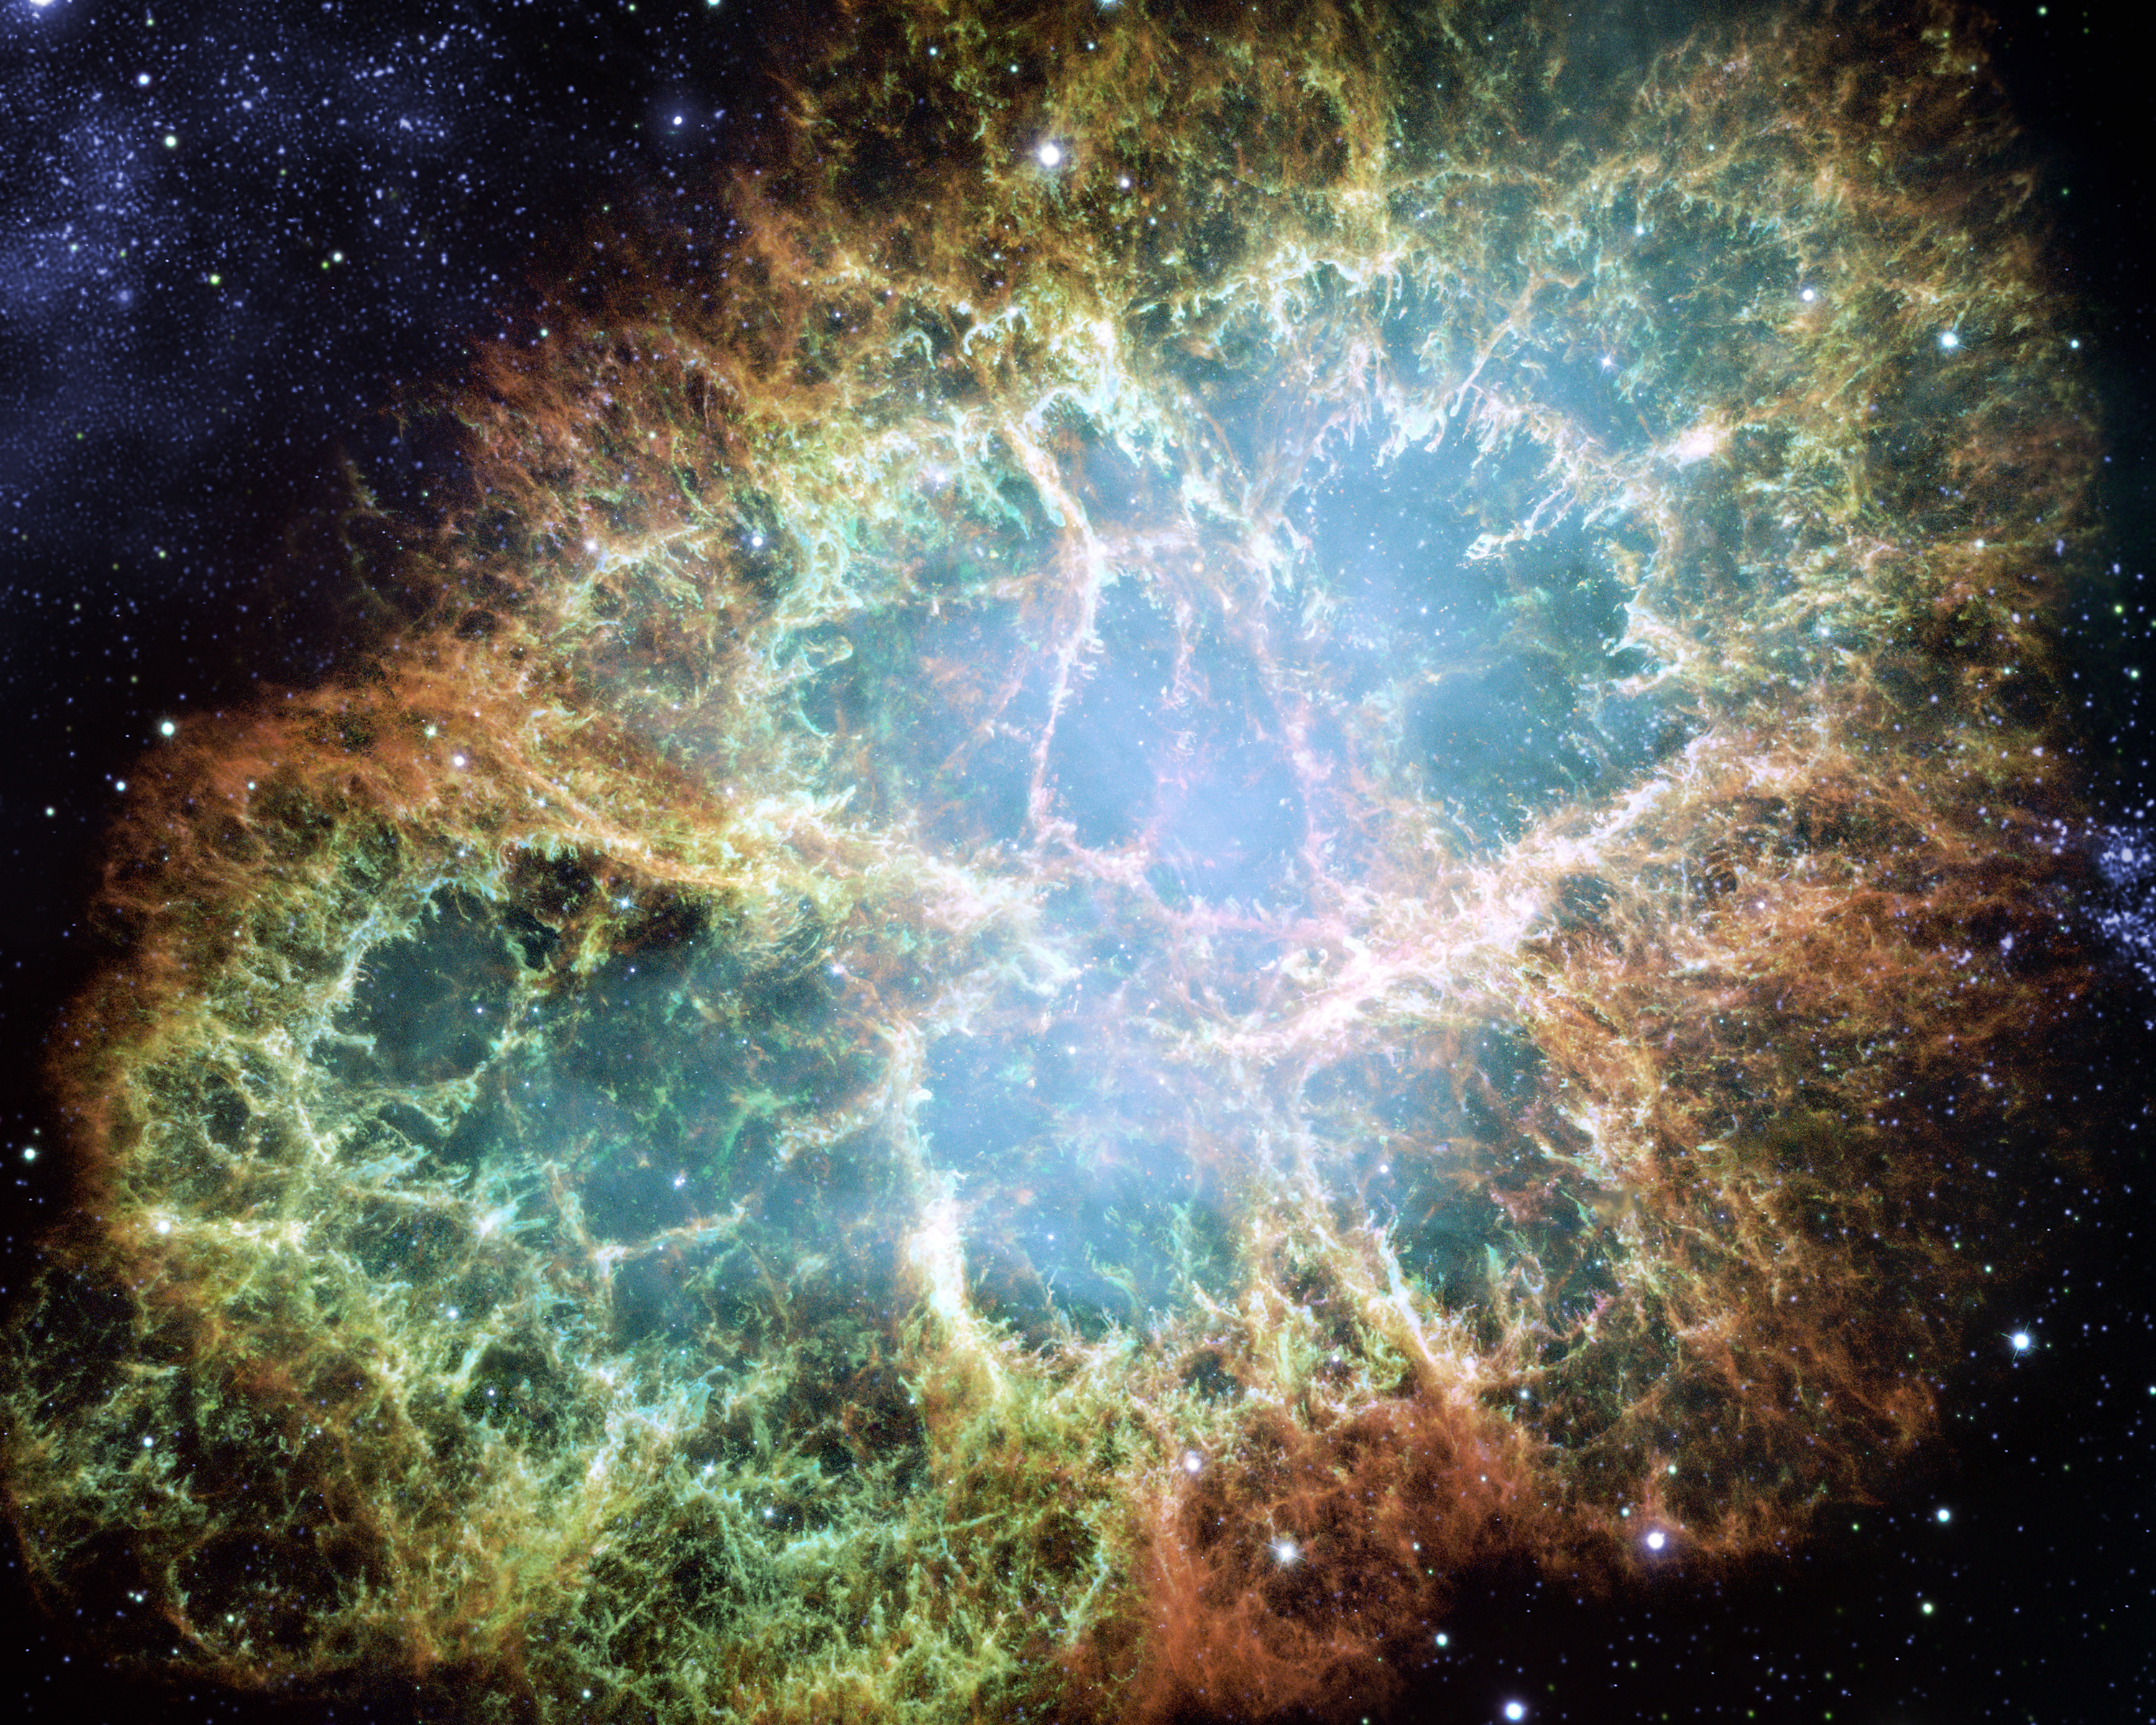

Animation still image 6

Still image from the animation of the 1054 supernova that created the Crab Nebula. Note: artist's impression.

Credit: ESA/Hubble